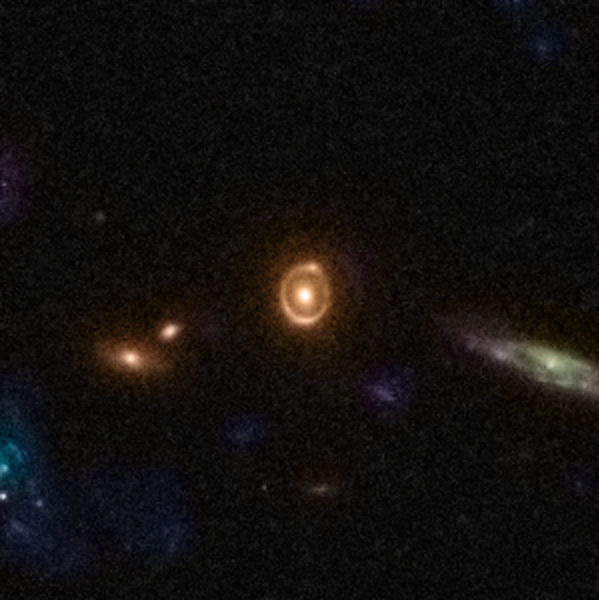

Gravitational Lens 0038+4133

An Einstein ring can be seen in this image from the COSMOS project. An Einstein ring is a complete circle image of a background galaxy, which is formed when the background galaxy, a massive, foreground galaxy, and the Hubble Space Telescope are all aligned perfectly.

This lens is an example of the rich diversity of 67 strong gravitational lenses found in the COSMOS survey. The lenses were discovered in a recently completed, large set of observations as part of a project to survey a single 1.6-square-degree field of sky (nine times the area of the full Moon) with several space-based and Earth-based observatories.

Gravitational lenses occur when light travelling towards us from a distant galaxy is magnified and distorted as it encounters a massive object between the galaxy and us. These gravitational lenses often allow astronomers to peer much further back into the early Universe than they would normally be able to.

Credit: NASA, ESA, C. Faure (Zentrum für Astronomie, University of Heidelberg) and J.P. Kneib (Laboratoire d'Astrophysique de Marseille)